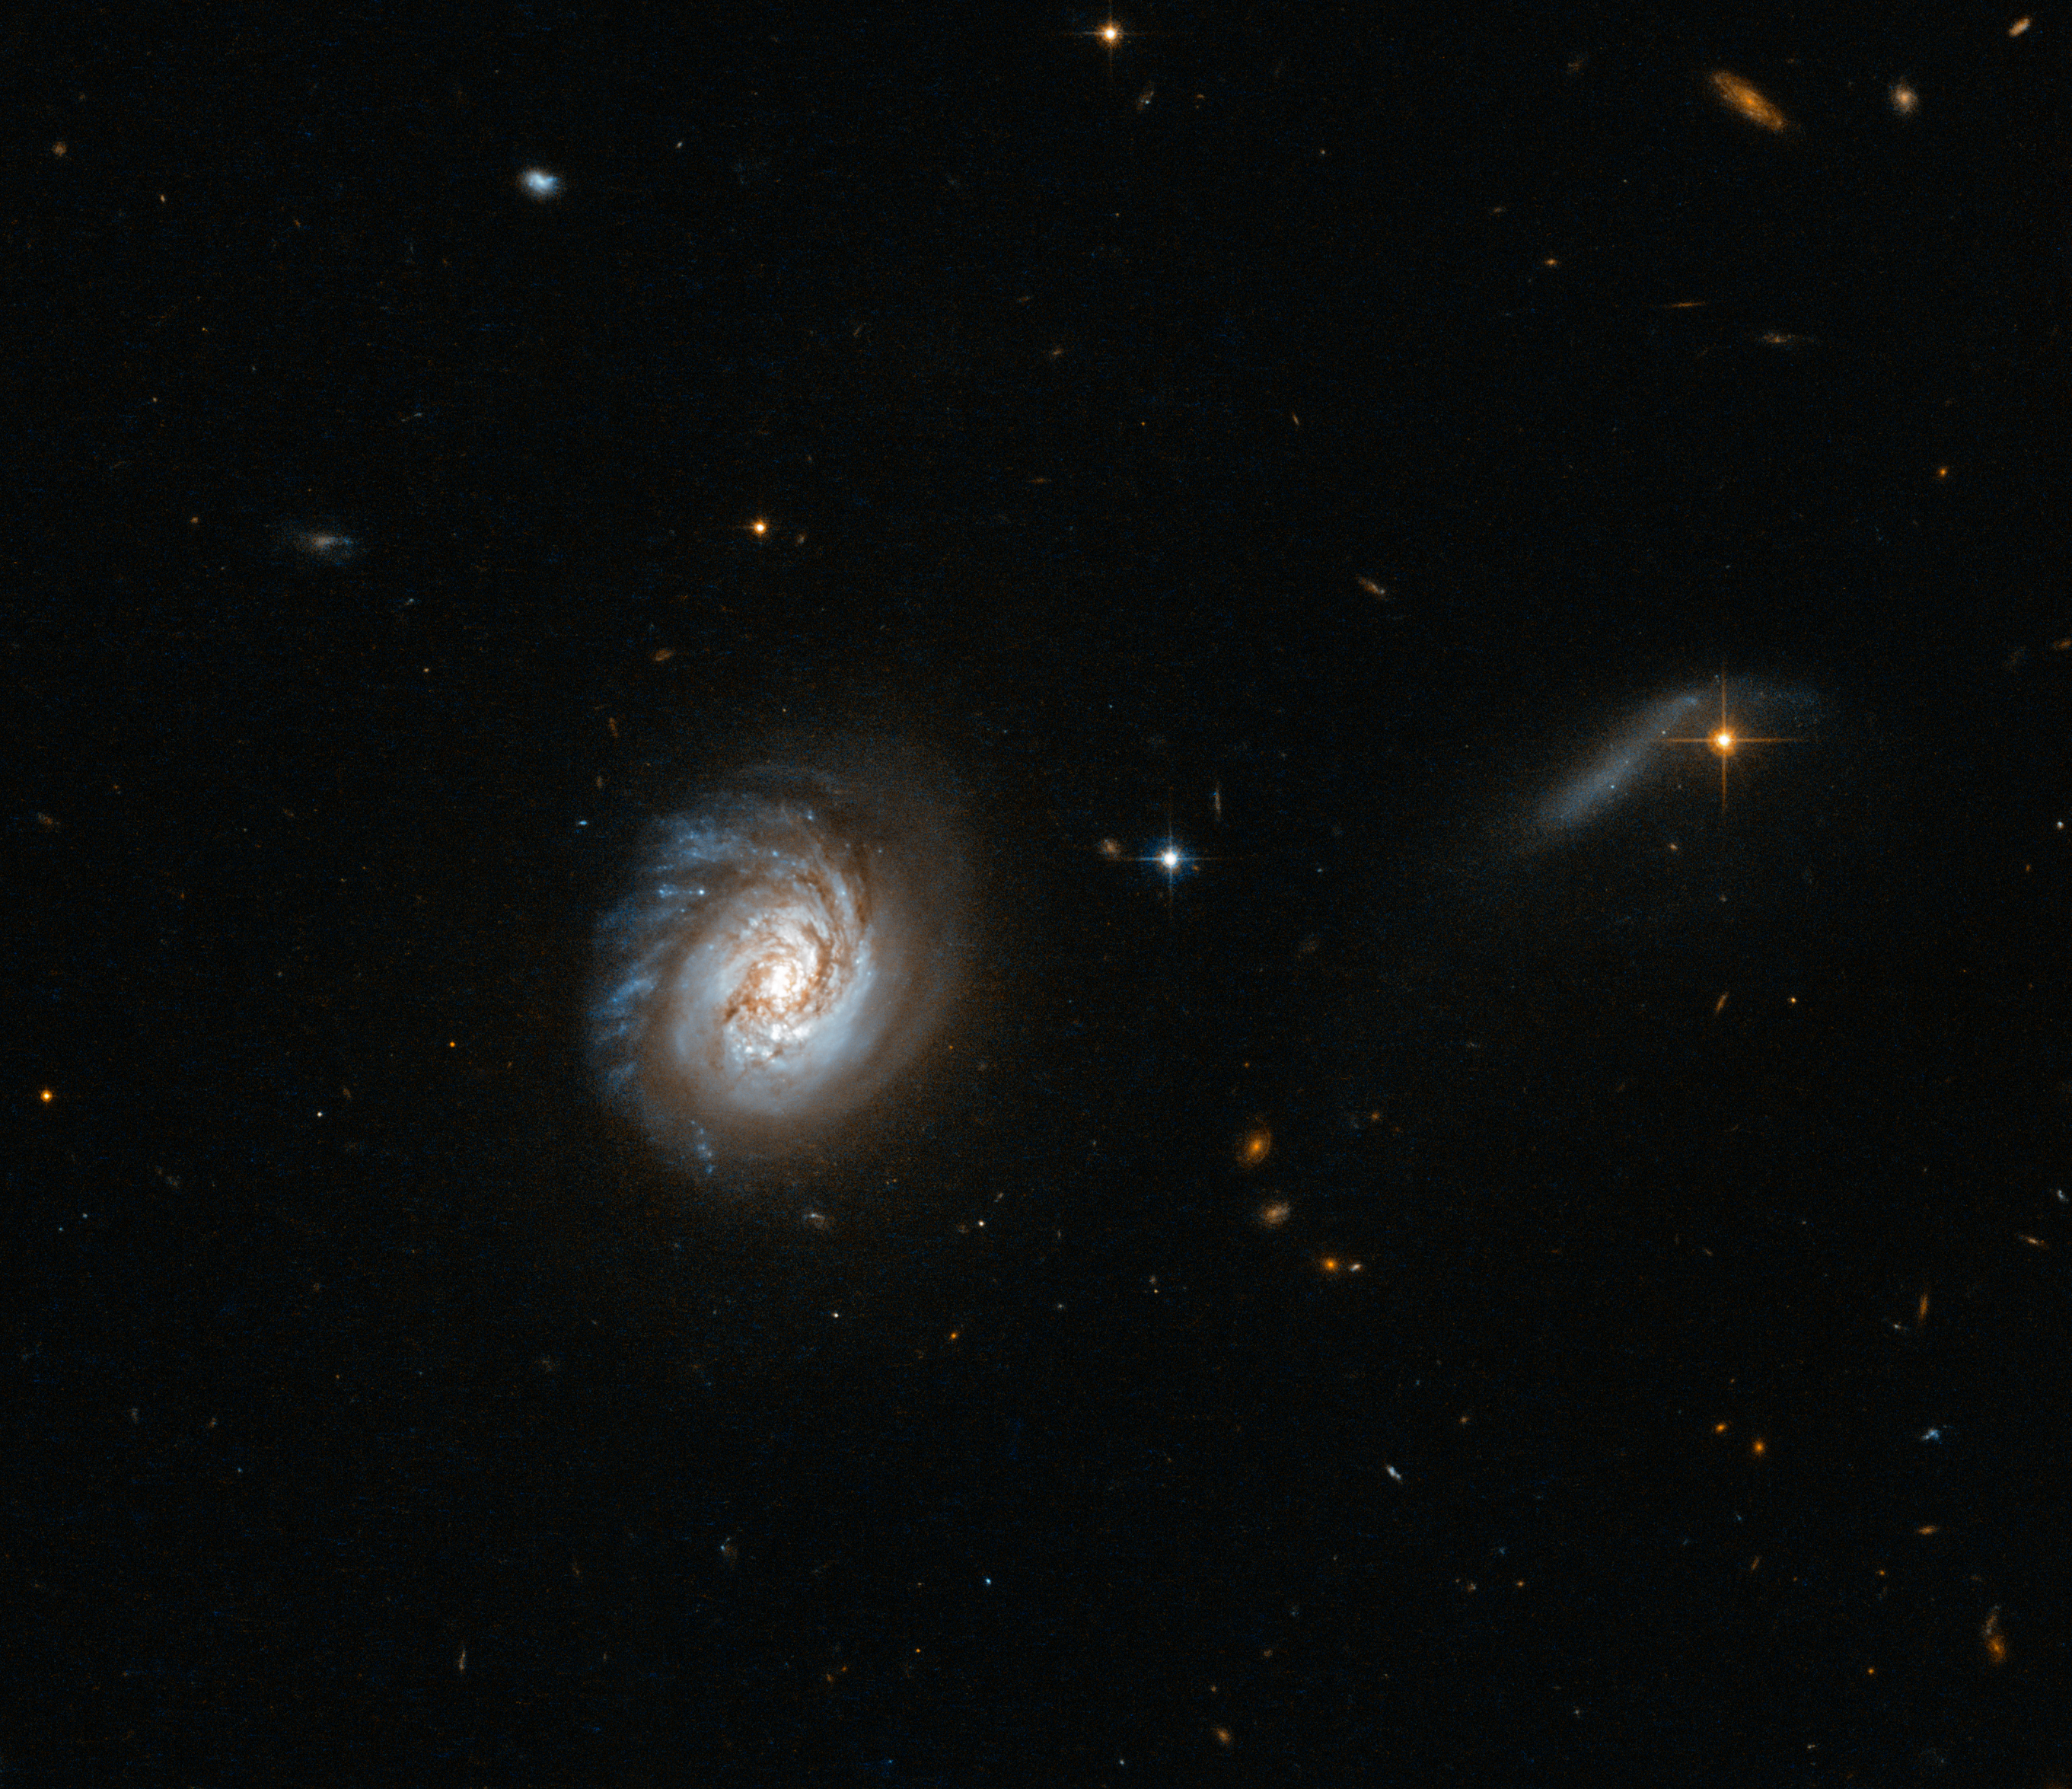

Starbursts versus monsters

The dominating figure in the middle of this new Hubble image is a galaxy known as MCG-03-04-014. It belongs to a class of galaxies called luminous infrared galaxies — galaxies that are incredibly bright in the infrared part of the spectrum.

This galaxy's status as a luminous infrared galaxy makes it part of an interesting astronomical question: starbursts versus monsters, a debate over how these galaxies are powered. Why are they so luminous in the infrared? Is it due to a recent burst of star formation, or a fiercely powerful "monster" black hole lurking at their core — or a mix of the two? The answer is still unclear.

This new image of MCG-03-04-014 shows bright sparks of star formation dotted throughout the galaxy, with murky dust lanes obscuring a bright central bulge. The galaxy seems to show evidence of disruption; at the top of the galaxy you can see bright wisps streaking into space, but the bottom is smooth and rounded. This asymmetrical appearance implies that another object is tugging at the galaxy and distorting its symmetry.

A version of this image was entered into the Hubble's Hidden Treasures image processing competition by contestant Judy Schmidt.

Credit: ESA/Hubble & NASA Acknowledgement: Judy Schmidt